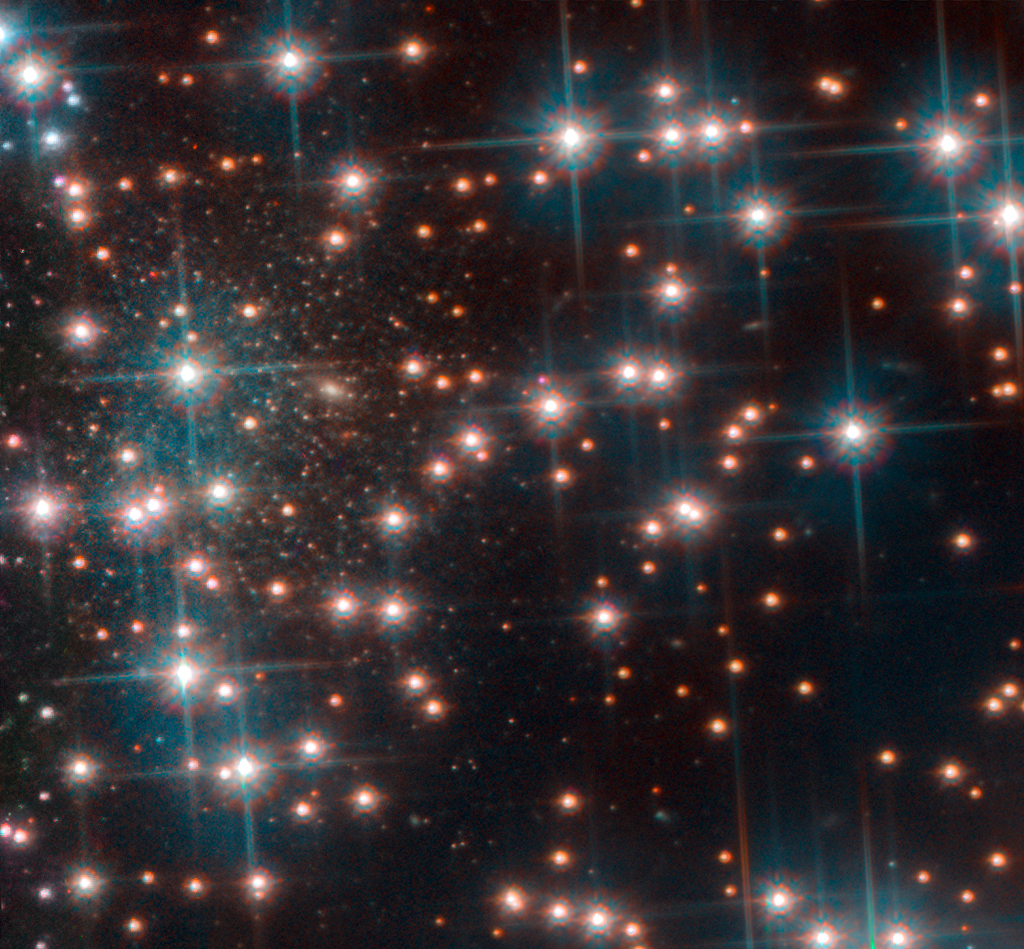

The accidentally discovered galaxy Bedin I

This image, taken with Hubble’s Advanced Camera for Surveys shows a part the globular cluster NGC 6752. Behind the bright stars of the cluster a denser collection of faint stars is visible — a previously unknown dwarf spheroidal galaxy. This galaxy, nicknamed Bedin 1, is about 30 million light-years from Earth.

Credit: ESA/Hubble, NASA, Bedin et al.